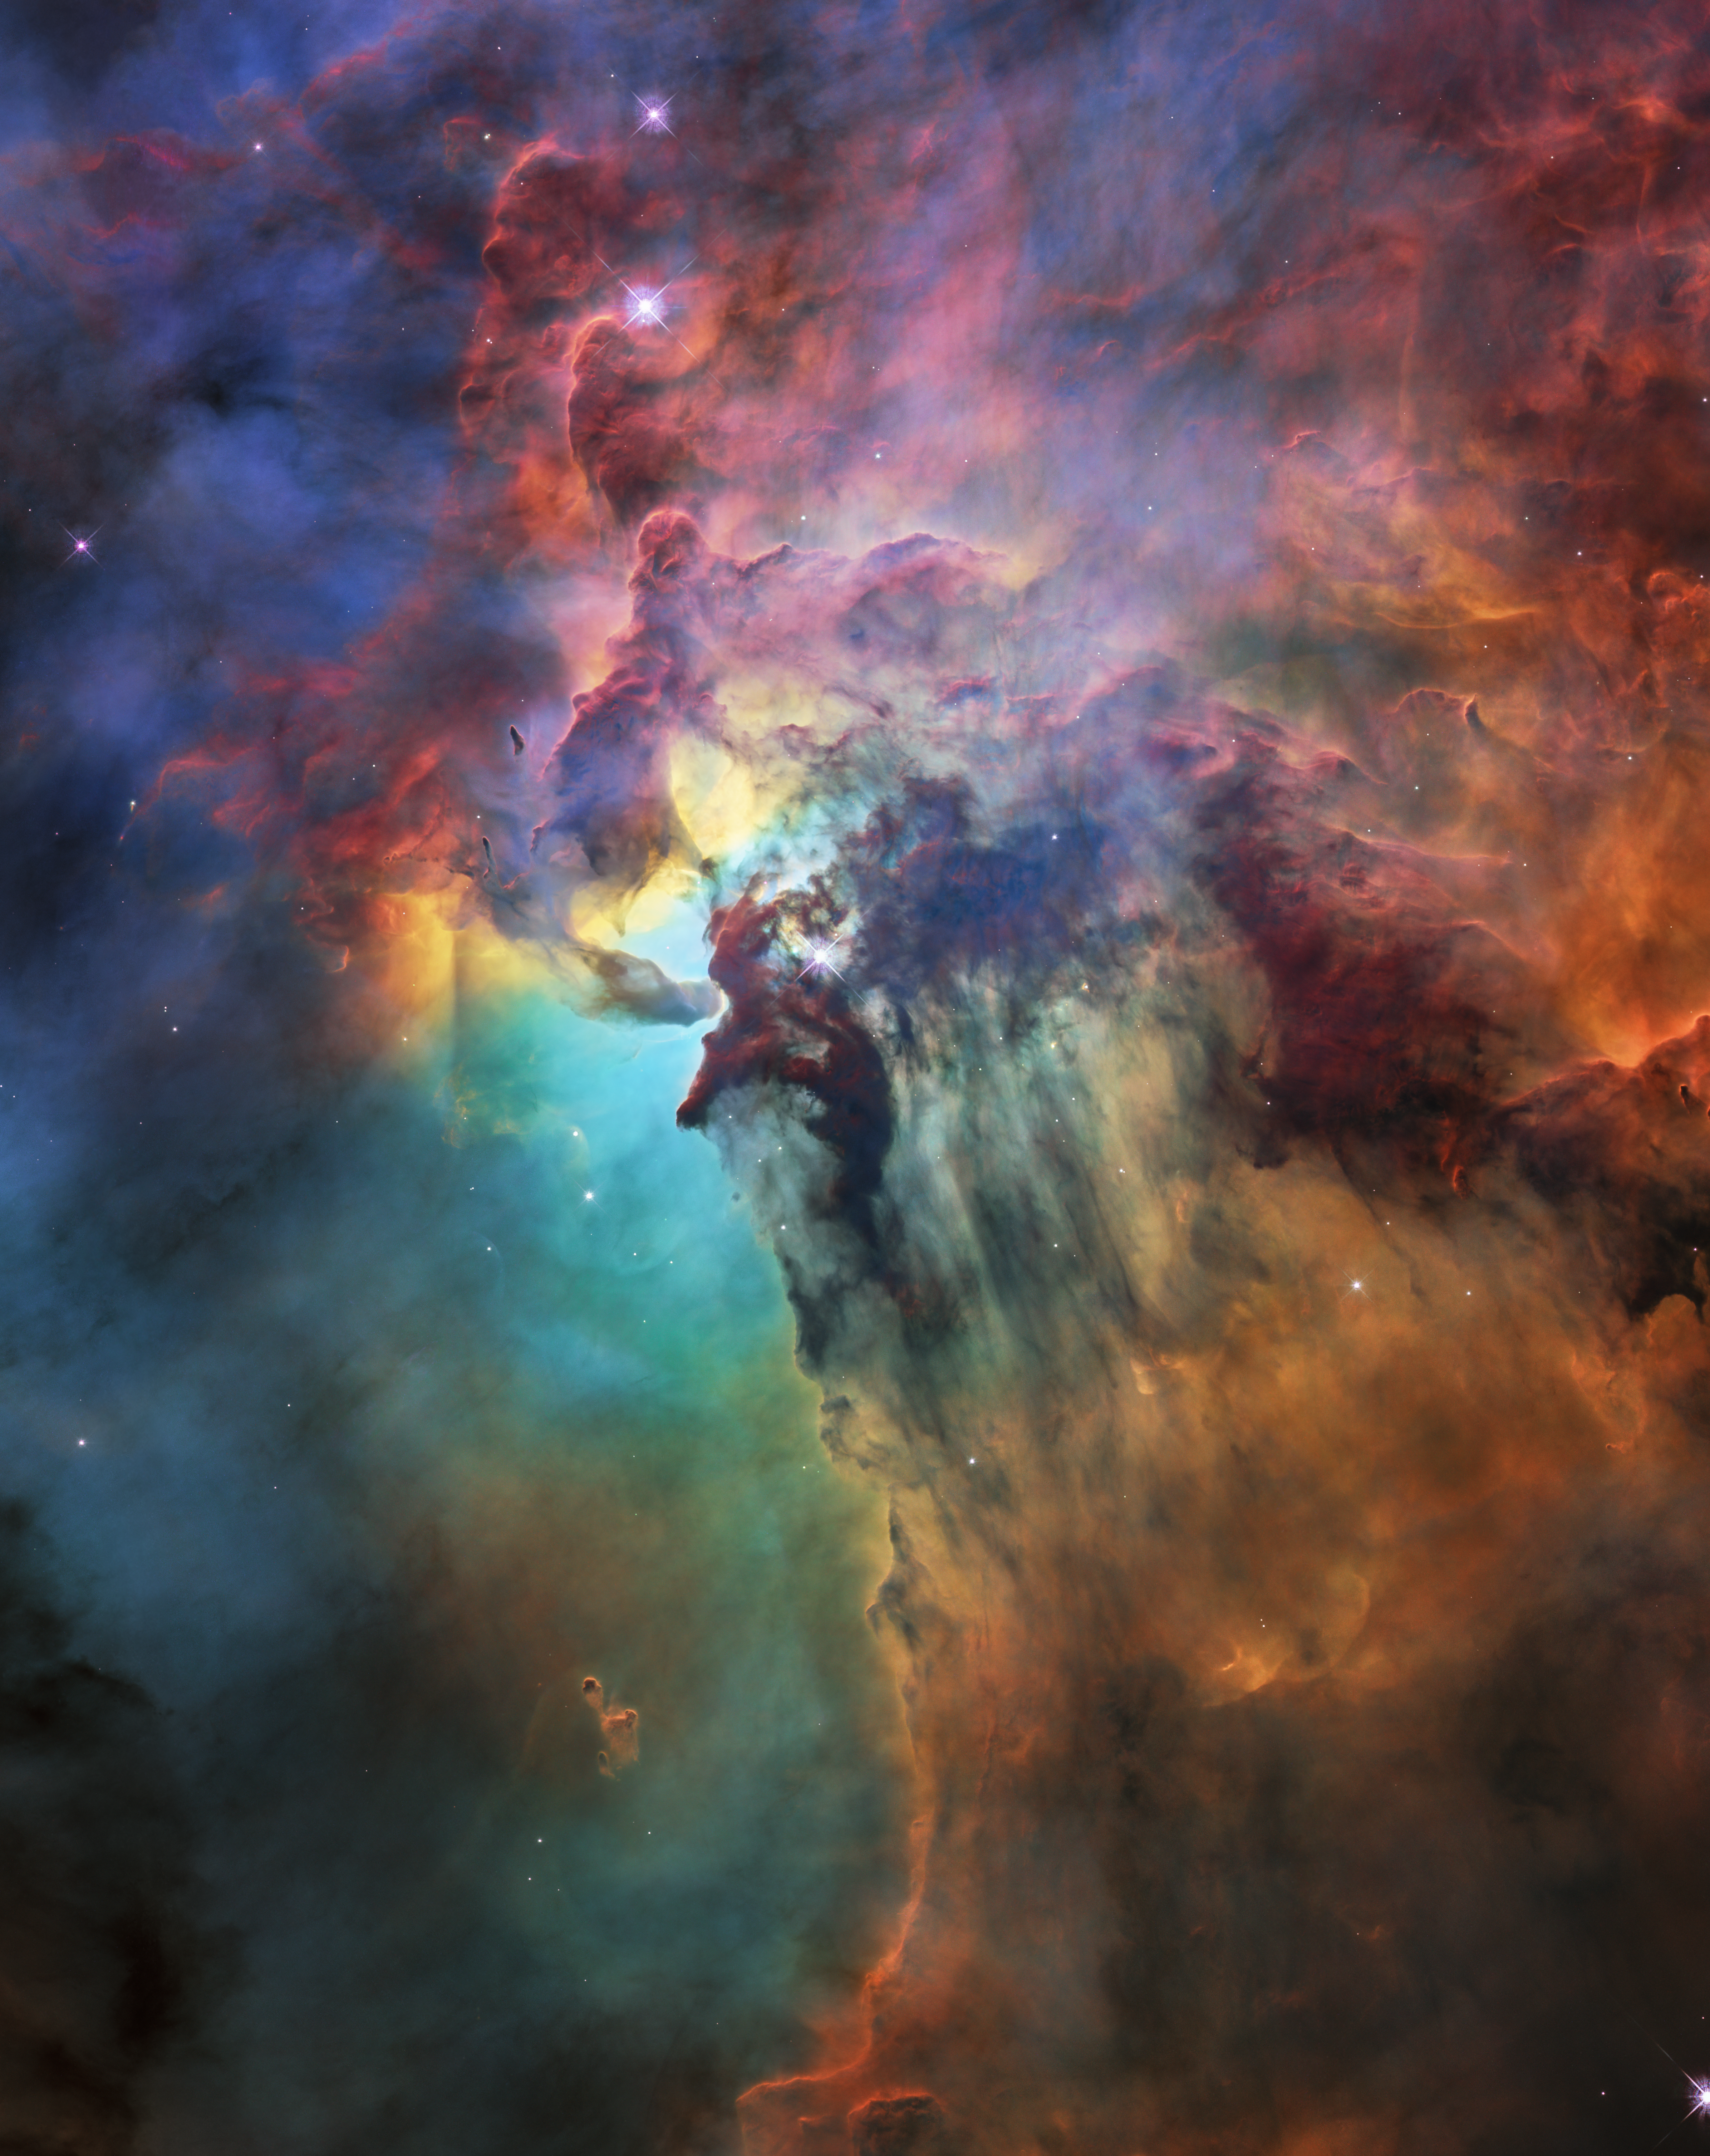

Hubble's 28th birthday picture: The Lagoon Nebula

To celebrate its 28th anniversary in space the NASA/ESA Hubble Space Telescope took this amazing and colourful image of the Lagoon Nebula. The whole nebula, about 4000 light-years away, is an incredible 55 light-years wide and 20 light-years tall. This image shows only a small part of this turbulent star-formation region, about four light-years across.

This stunning nebula was first catalogued in 1654 by the Italian astronomer Giovanni Battista Hodierna, who sought to record nebulous objects in the night sky so they would not be mistaken for comets. Since Hodierna’s observations, the Lagoon Nebula has been photographed and analysed by many telescopes and astronomers all over the world.

The observations were taken by Hubble’s Wide Field Camera 3 between 12 February and 18 February 2018.

Credit: NASA, ESA, STScI